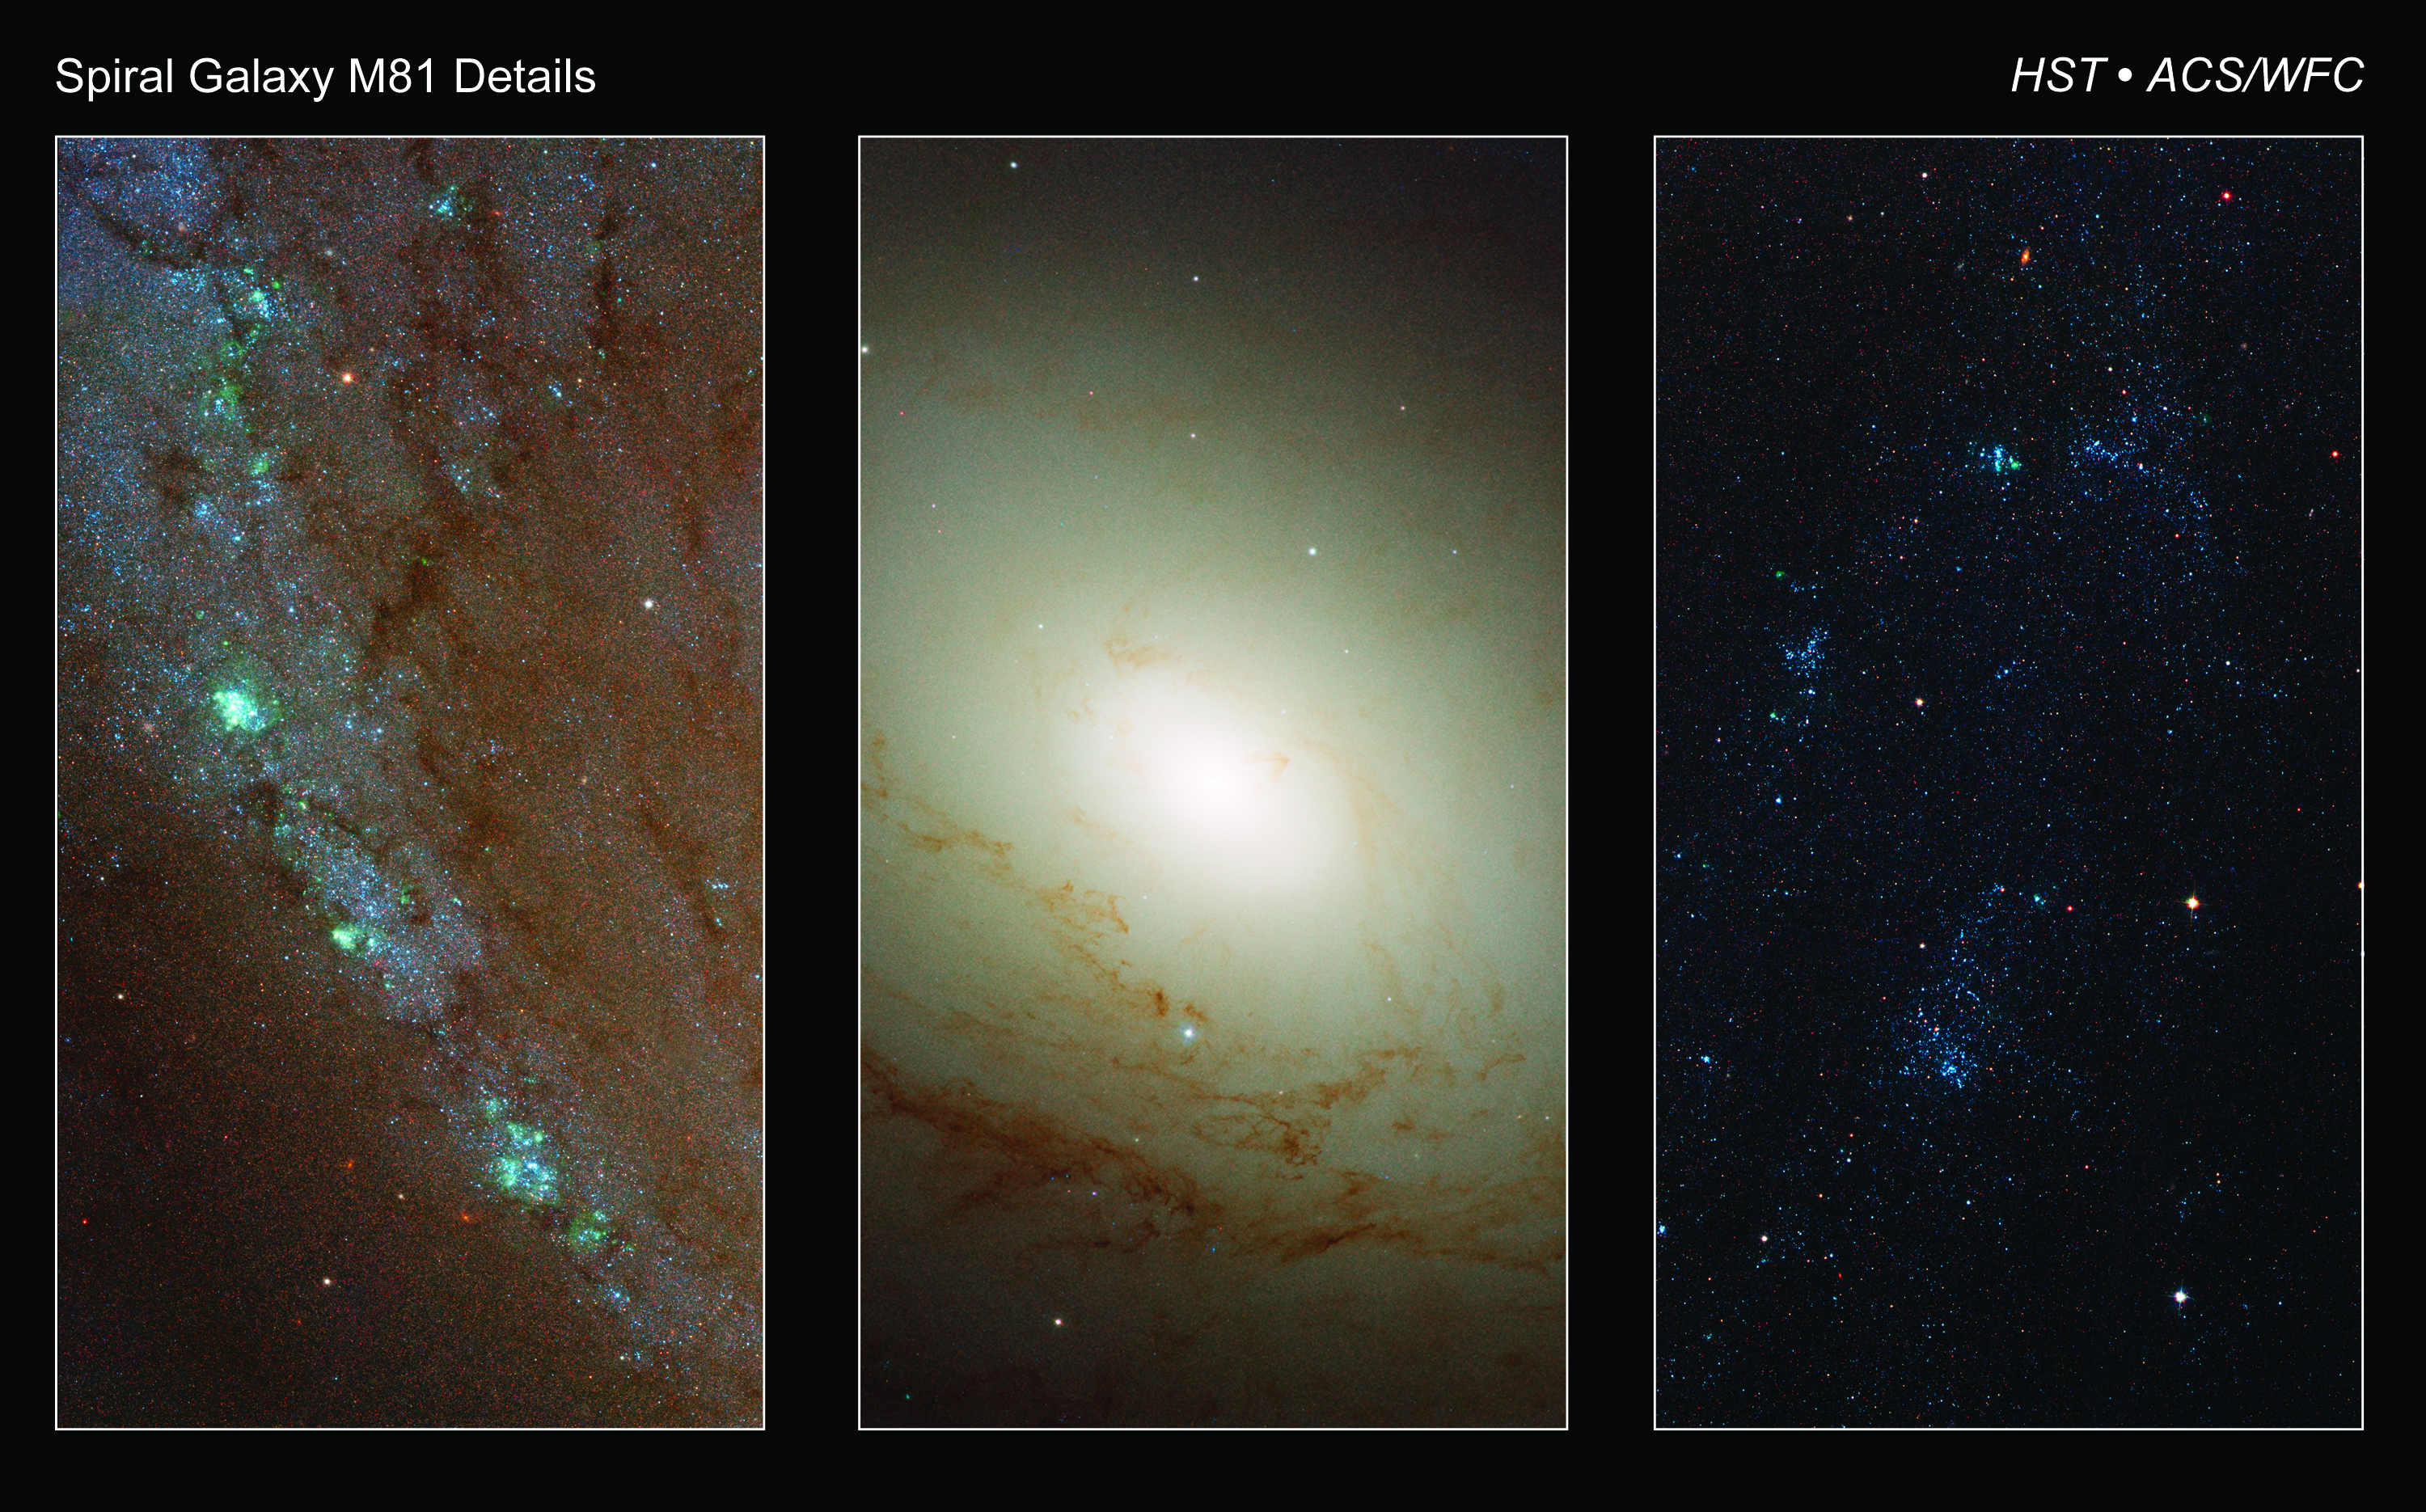

Detailed images of spiral galaxy M81

Hubble's high-resolution images of distinct regions contained within M81 illustrate various structures contained within the spiral galaxy.

[Left] A string of star-forming regions show along a spiral arm, their glowing hydrogen gas appears green in color. A denser concentration of dust is visible along the arms.

[Middle] The inner bulge and nucleus of M81 is relatively structure free, except for fine dust lanes that wind into the center. Several whitish-colored concentrations of stars, known as globular clusters are easily visible.

[Right] Interspersed within the active spiral arms are areas of new star formation. Here, associations of hot blue stars have formed. These massive stars' lifetimes are relatively short compared to the overall age of the galaxy. Their existence and inevitable death will help to enrich the surrounding area with heavier elements which will in turn make more robust, longer-living stars.

Credit: NASA, ESA and the Hubble Heritage Team (STScI/AURA). Acknowledgment: A. Zezas and J. Huchra (Harvard-Smithsonian Center for Astrophysics)